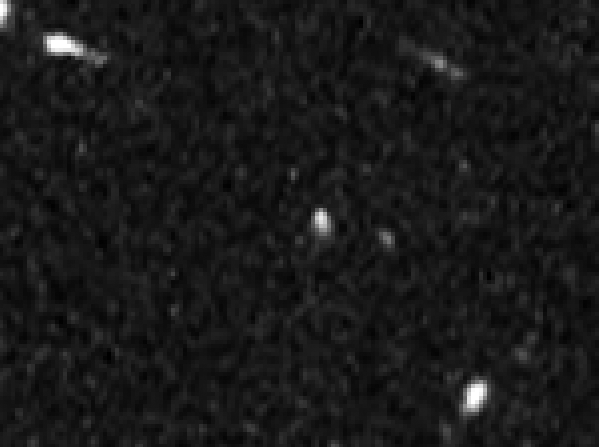

HUDF detail without SN Primo

This image shows part of the Hubble Ultra Deep Field which, after this image was taken, became home to SN Primo, the most distant Type Ia supernova to be confirmed to date.

The sighting of SN Primo is the first finding of an ambitious survey that will help astronomers place better constraints on the nature of dark energy, the mysterious repulsive force which is causing the universe to fly apart at an ever increasing rate.

Credit: NASA, ESA, A. Riess (STScI and JHU), and S. Rodney (JHU)